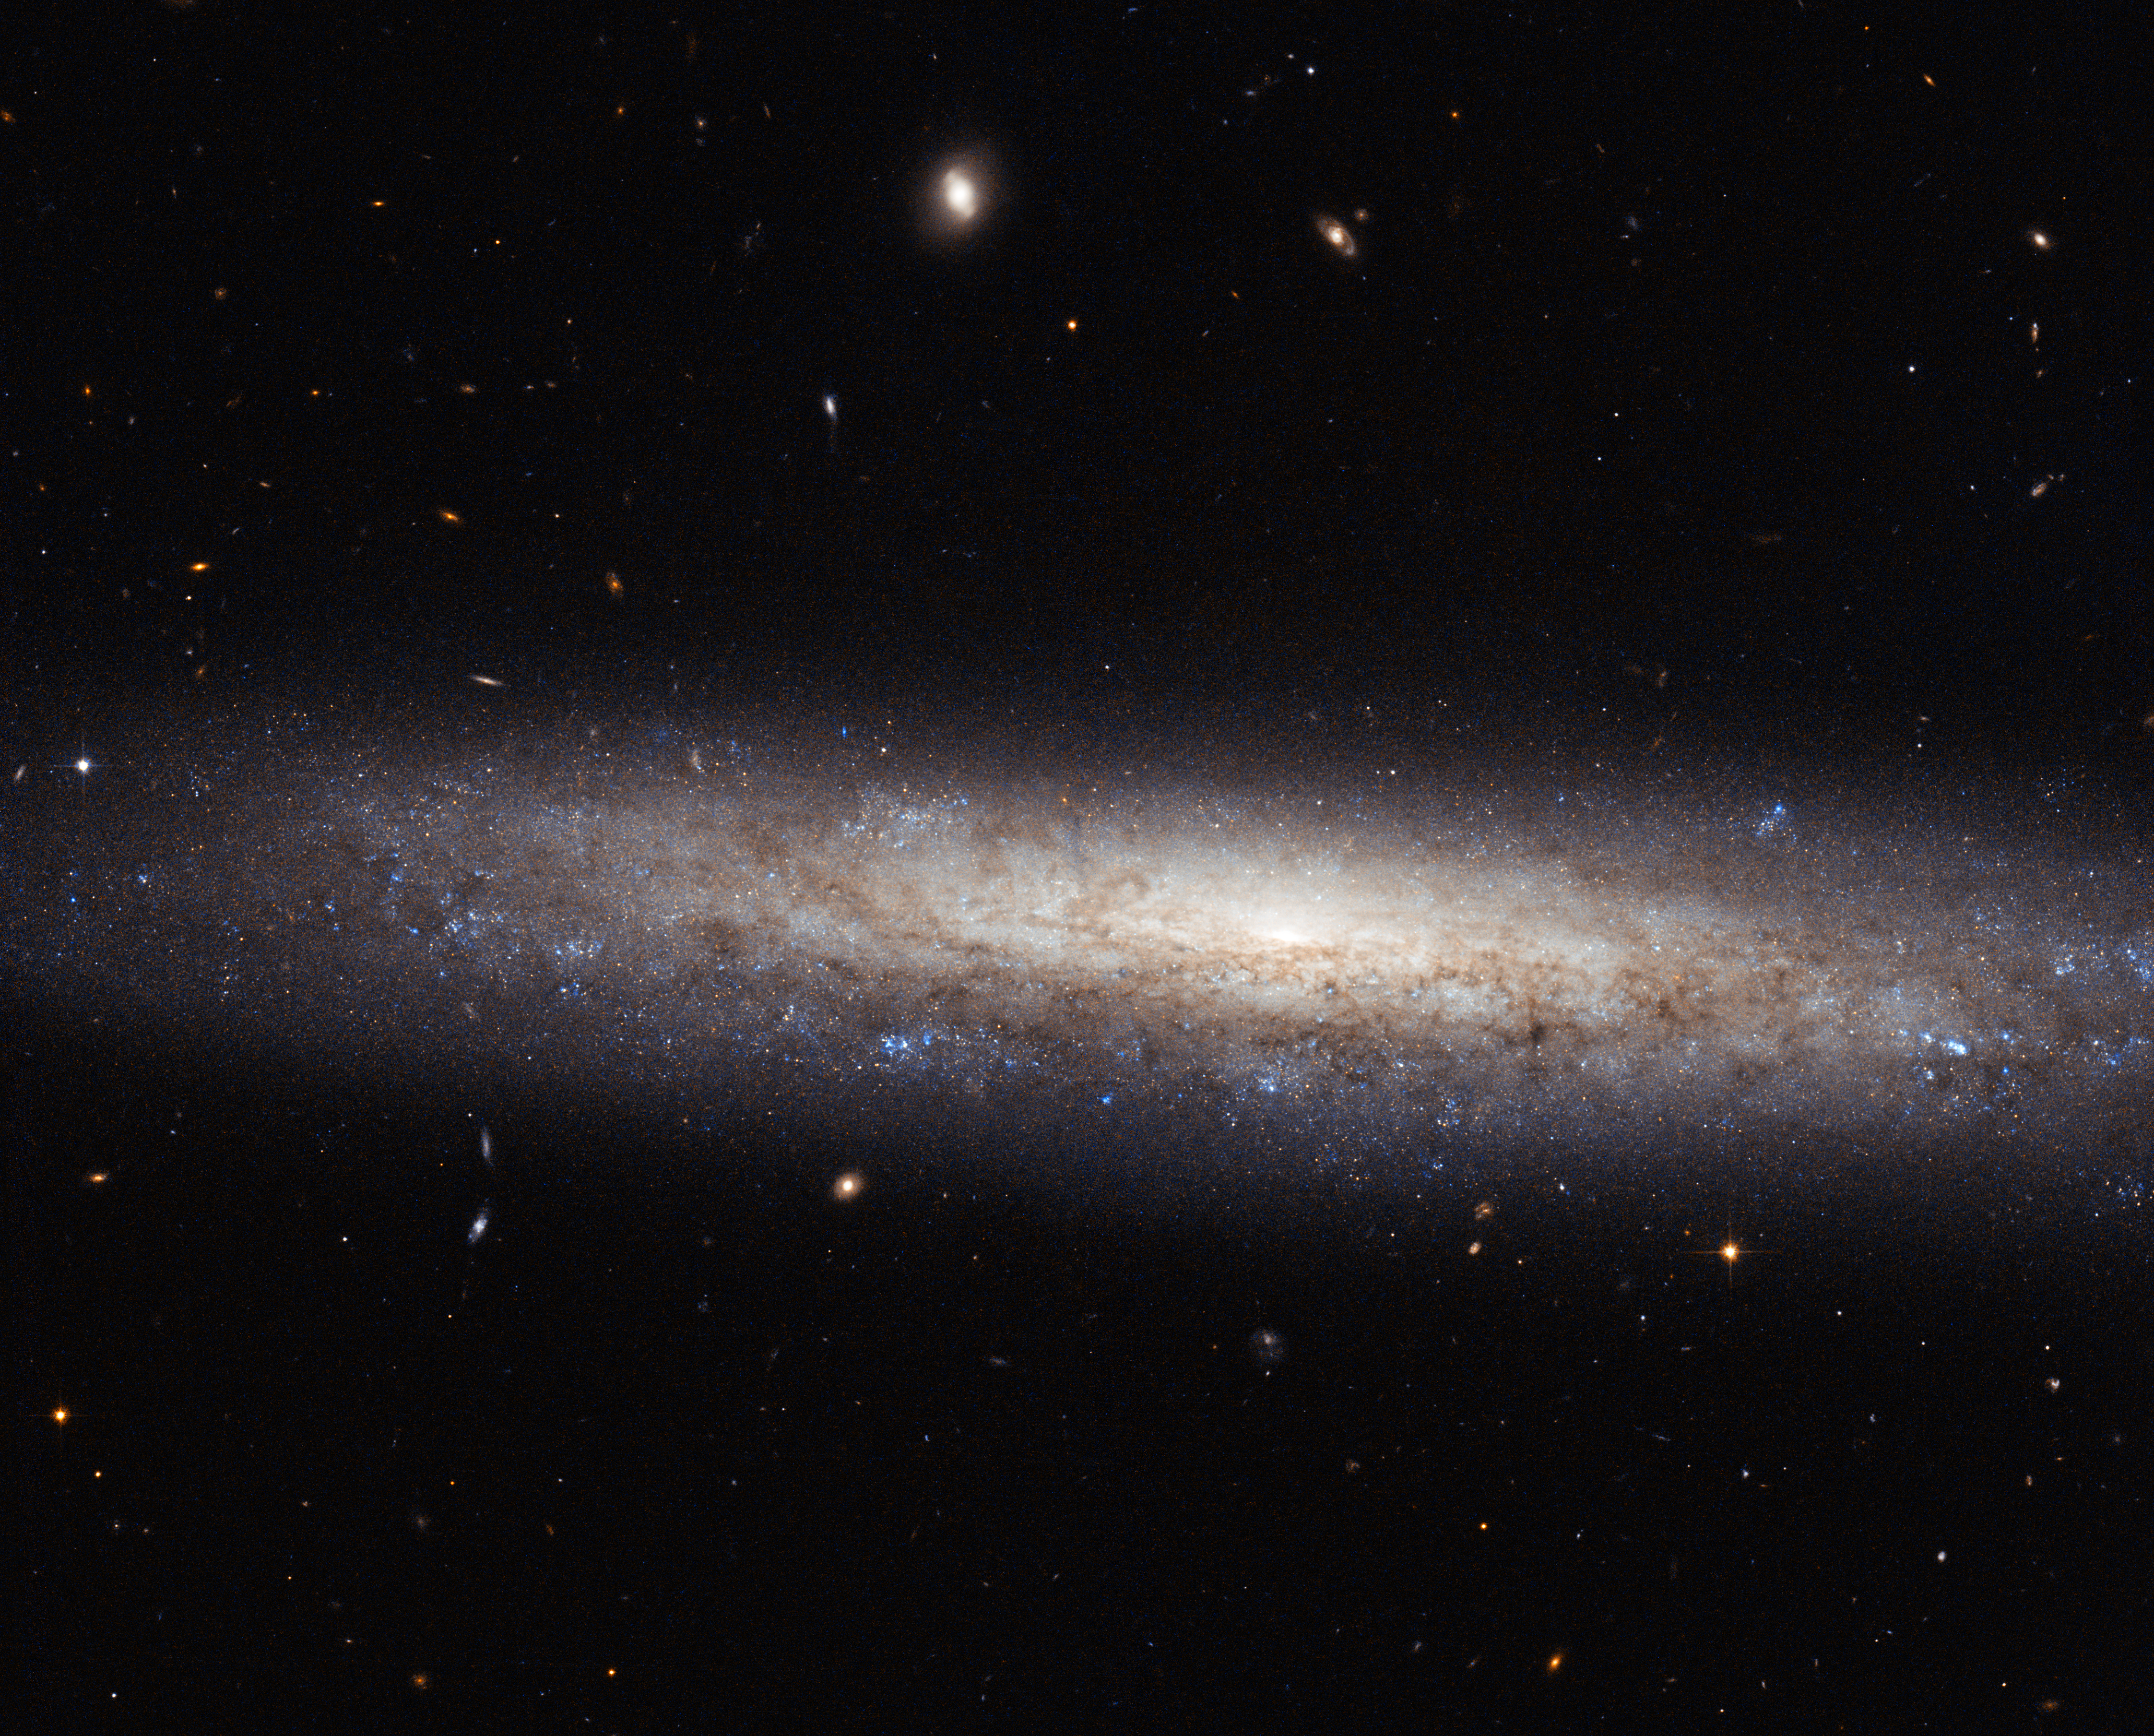

A dusty spiral in Virgo

This magnificent new image taken with the NASA/ESA Hubble Space Telescope shows the edge-on spiral galaxy NGC 4206, located about 70 million light-years away from Earth in the constellation of Virgo.

Captured here are vast streaks of dust, some of which are obscuring the central bulge, which can just be made out in the centre of the galaxy. Towards the edges of the galaxy, the scattered clumps, which appear blue in this image, mark areas where stars are being born. The bulge, on the other hand, is composed mostly of much older, redder stars, and very little star formation takes place.

NGC 4206 was imaged as part of a Hubble snapshot survey of nearby edge-on spiral galaxies to measure the effect that the material between the stars — known as the interstellar medium — has on light as it travels through it. Using its Advanced Camera for Surveys, Hubble can reveal information about the dusty material and hydrogen gas in the cold parts of the interstellar medium. Astronomers are then able to map the absorption and scattering of light by the material — an effect known as extinction — which causes objects to appear redder to us, the observers.

NGC 4206 is visible with most moderate amateur telescopes at 13th magnitude. It was discovered by Hanoverian-born British astronomer, William Herschel on 17 April 1784.

A version of this image was entered into the Hubble's Hidden Treasures image processing competition by contestant Nick Rose.

Credit: ESA/Hubble & NASA Acknowledgement: Nick Rose